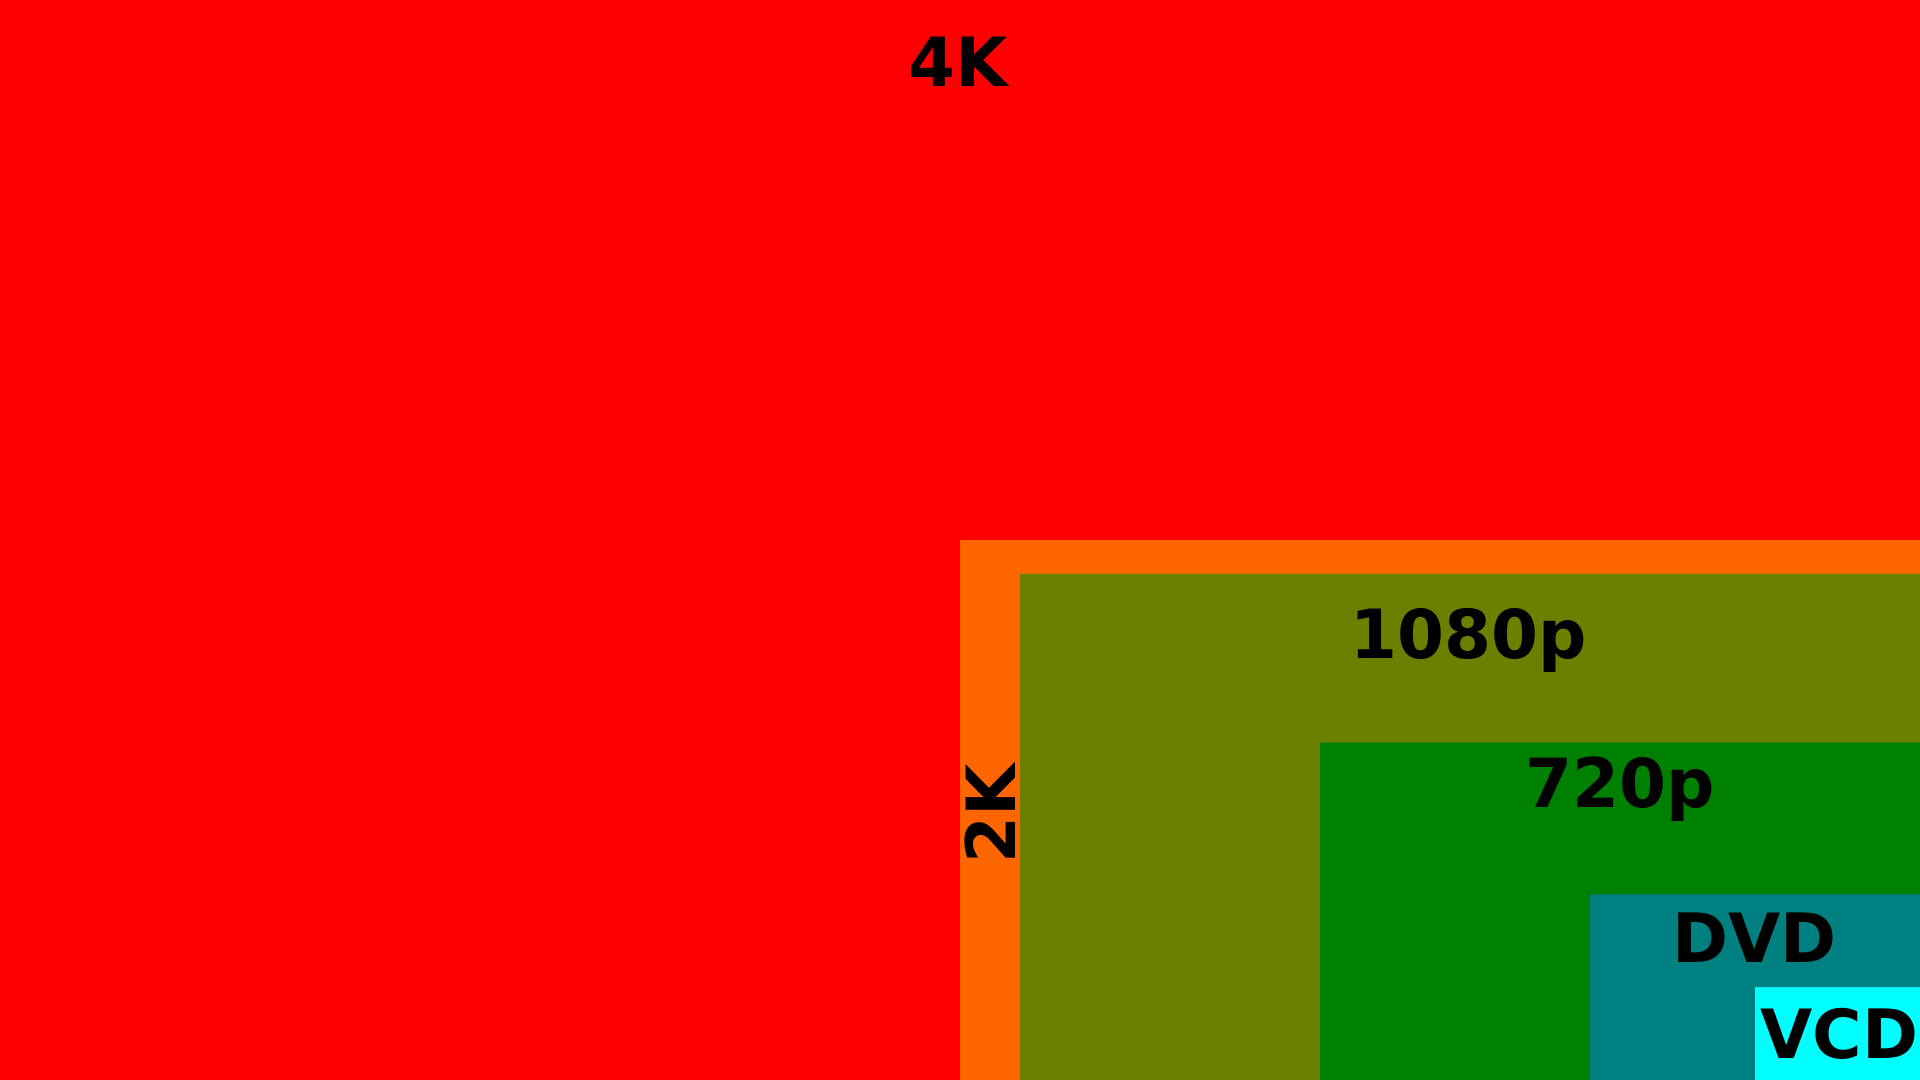

Ultra HD format

Ultra HD, or 4K resolution, is a generic term for display devices or content having horizontal resolution on the order of 4000 pixels. ESO provides free downloadable material in this format. Read more about it in the announcement ann14006 "Ultra HD Adds a New Dimension to ESO Videos".

Credit: ESA/Hubble